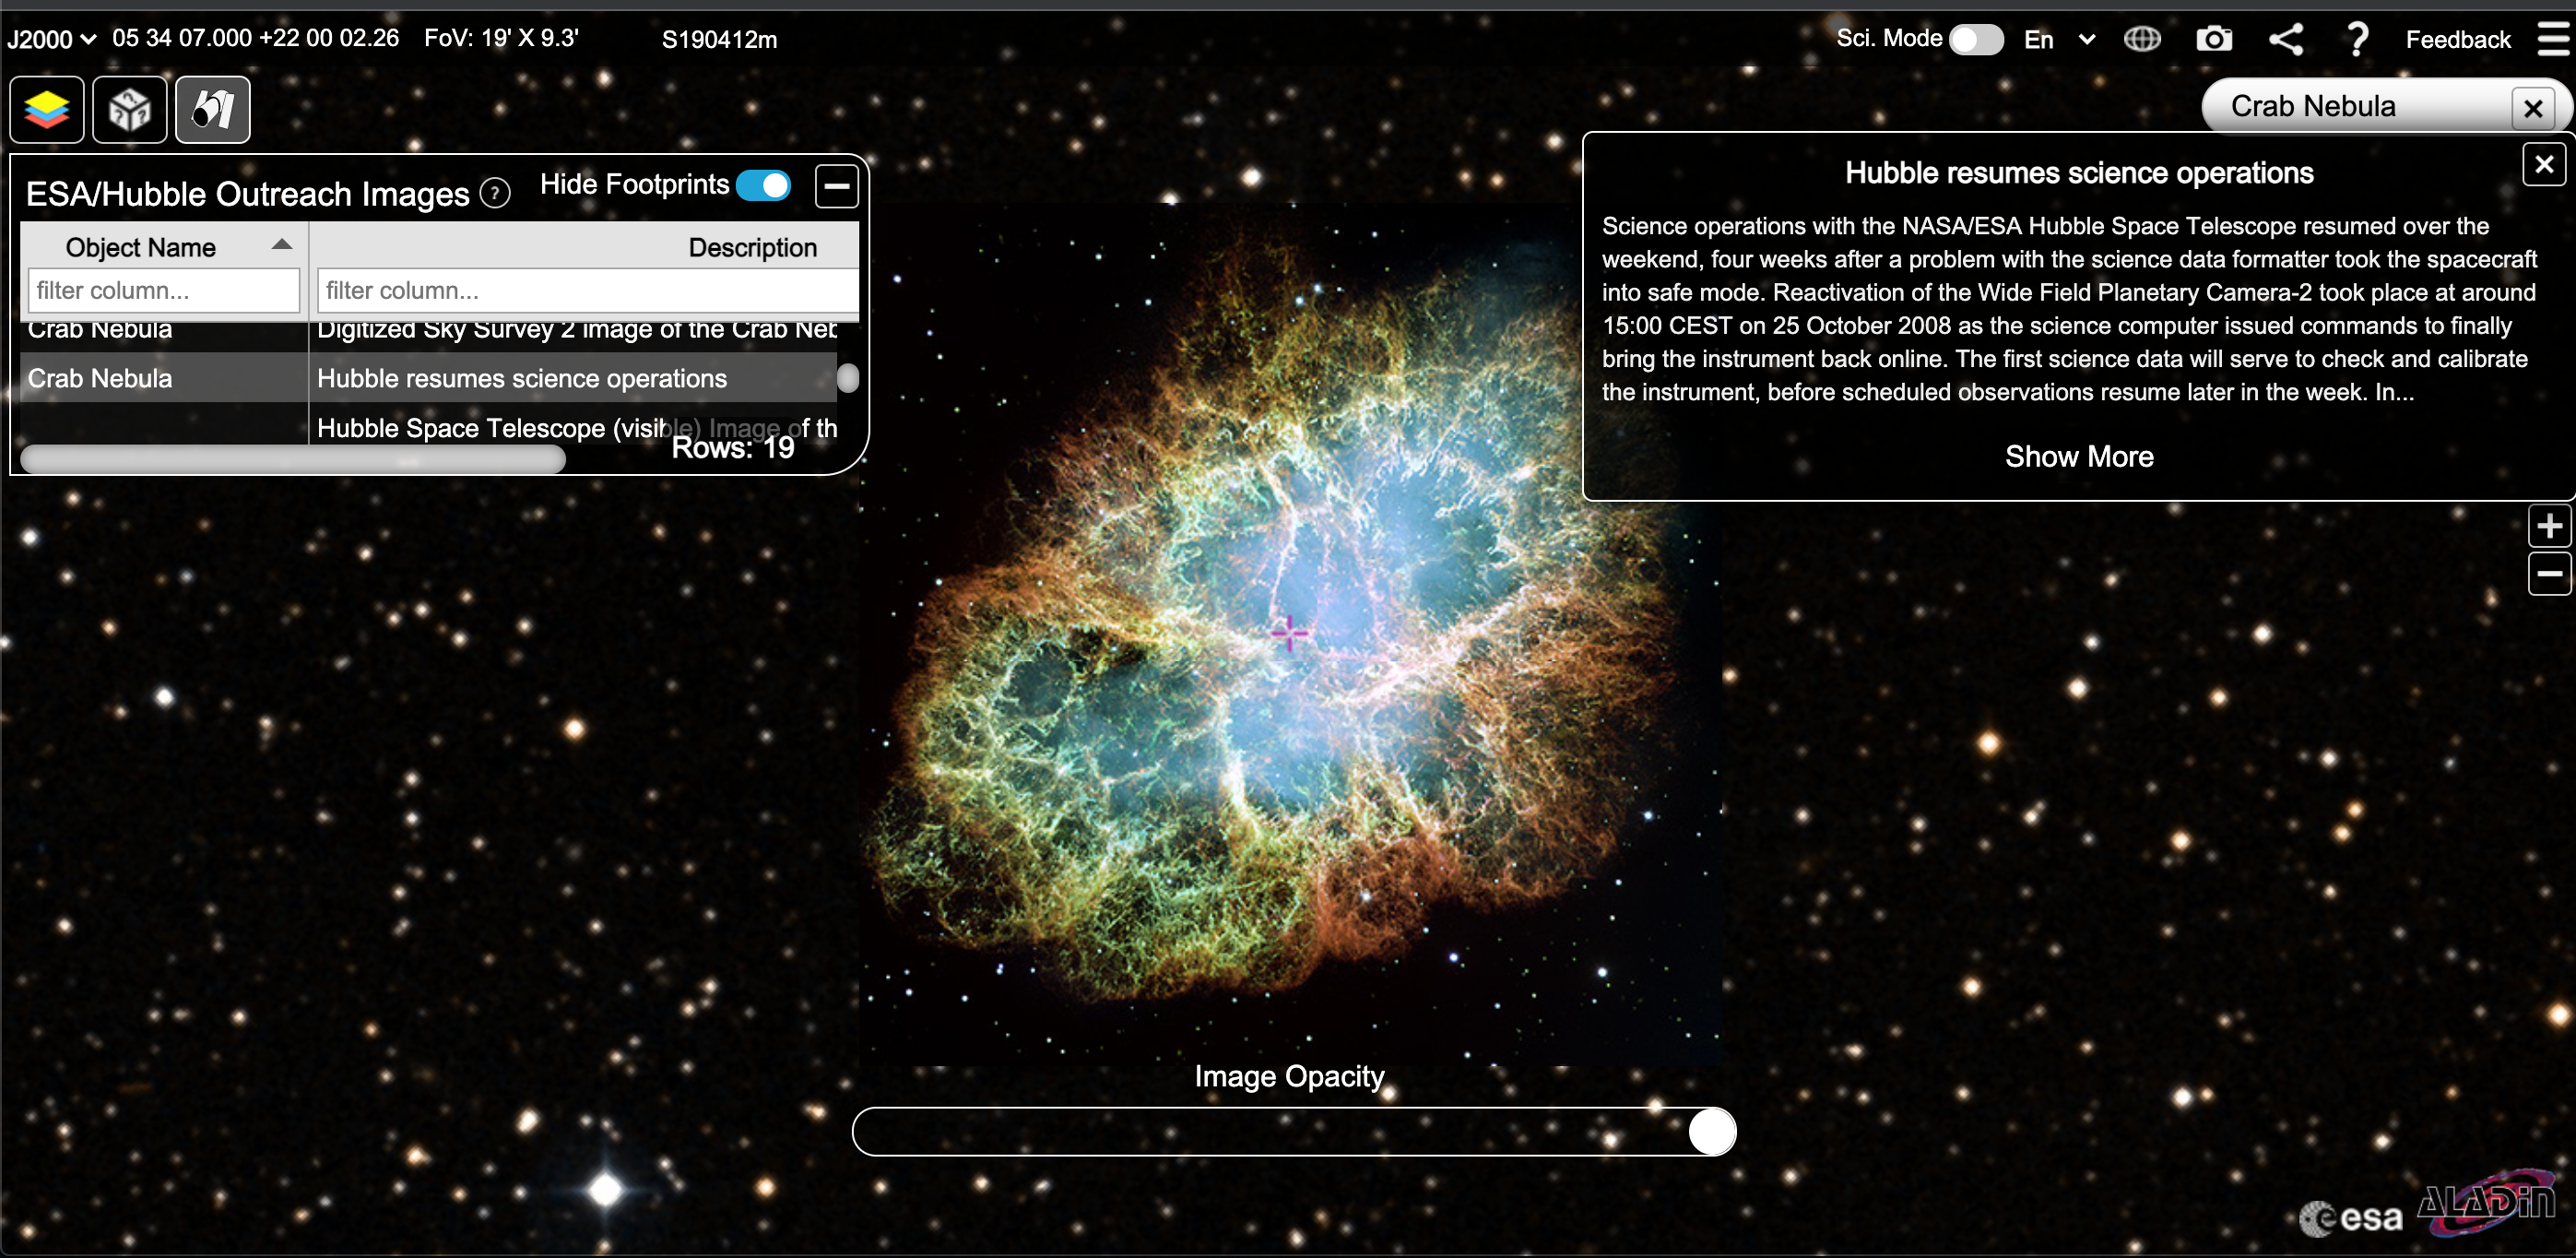

Screenshot of ESA/Hubble Outreach Image on the ESASky Platform

This image is a screenshot of the ESA/Hubble outreach image of the Crab Nebula in the ESASky platform. The ESA/Hubble and ESASky teams have collaboratively developed an application programming interface that connects the outreach images on the ESA/Hubble website with the ESASky application, which allows users to visualise and download public astronomical data.

Credit: ESA/Hubble & ESASky